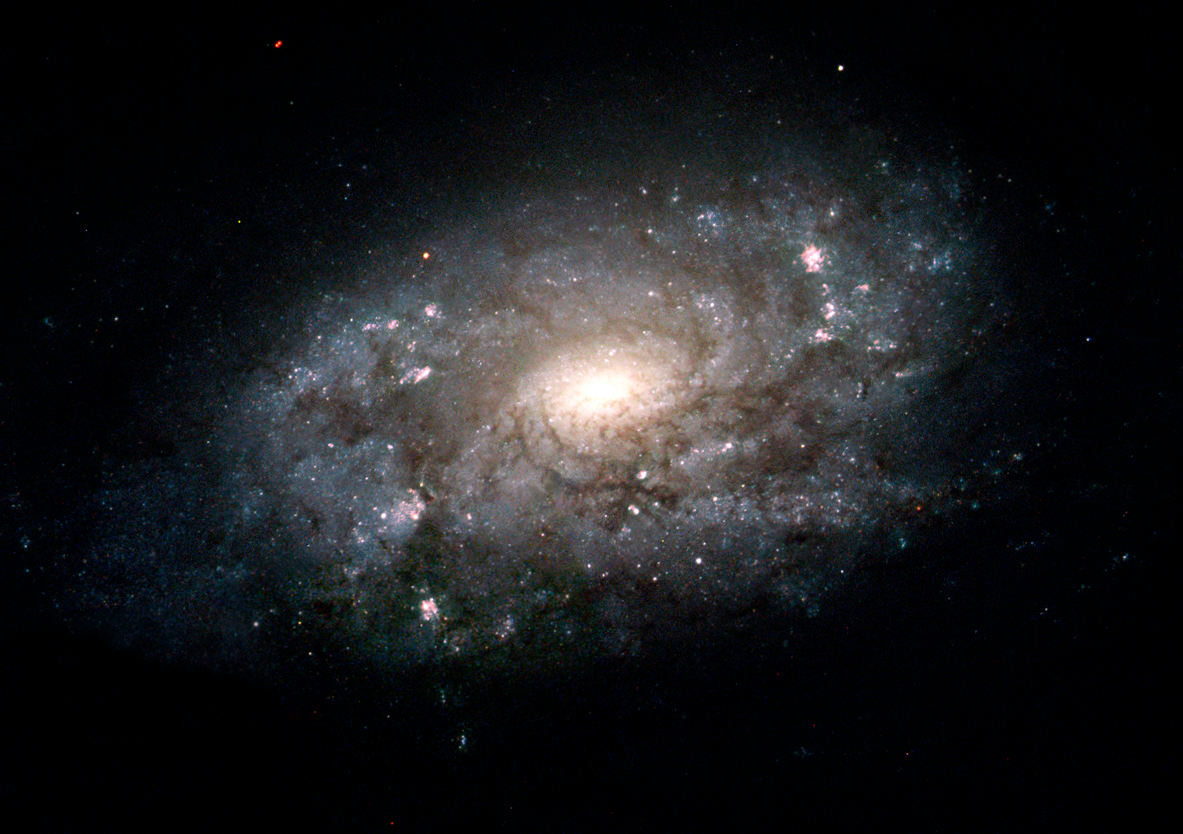

Hubble Images Majestic Cousin of the Milky Way

Our Sun and solar system are embedded in a broad pancake of stars deep within the disk of the Milky Way galaxy. Even from a distance, it is impossible to see our galaxy's large-scale features other than the disk. The next best thing is to look farther out into the universe at galaxies that are similar in shape and structure to our home galaxy. Other spiral galaxies like NGC 3949, pictured in the Hubble image, fit the bill.

Credit: NASA/ESA and The Hubble Heritage Team (STScI/AURA)